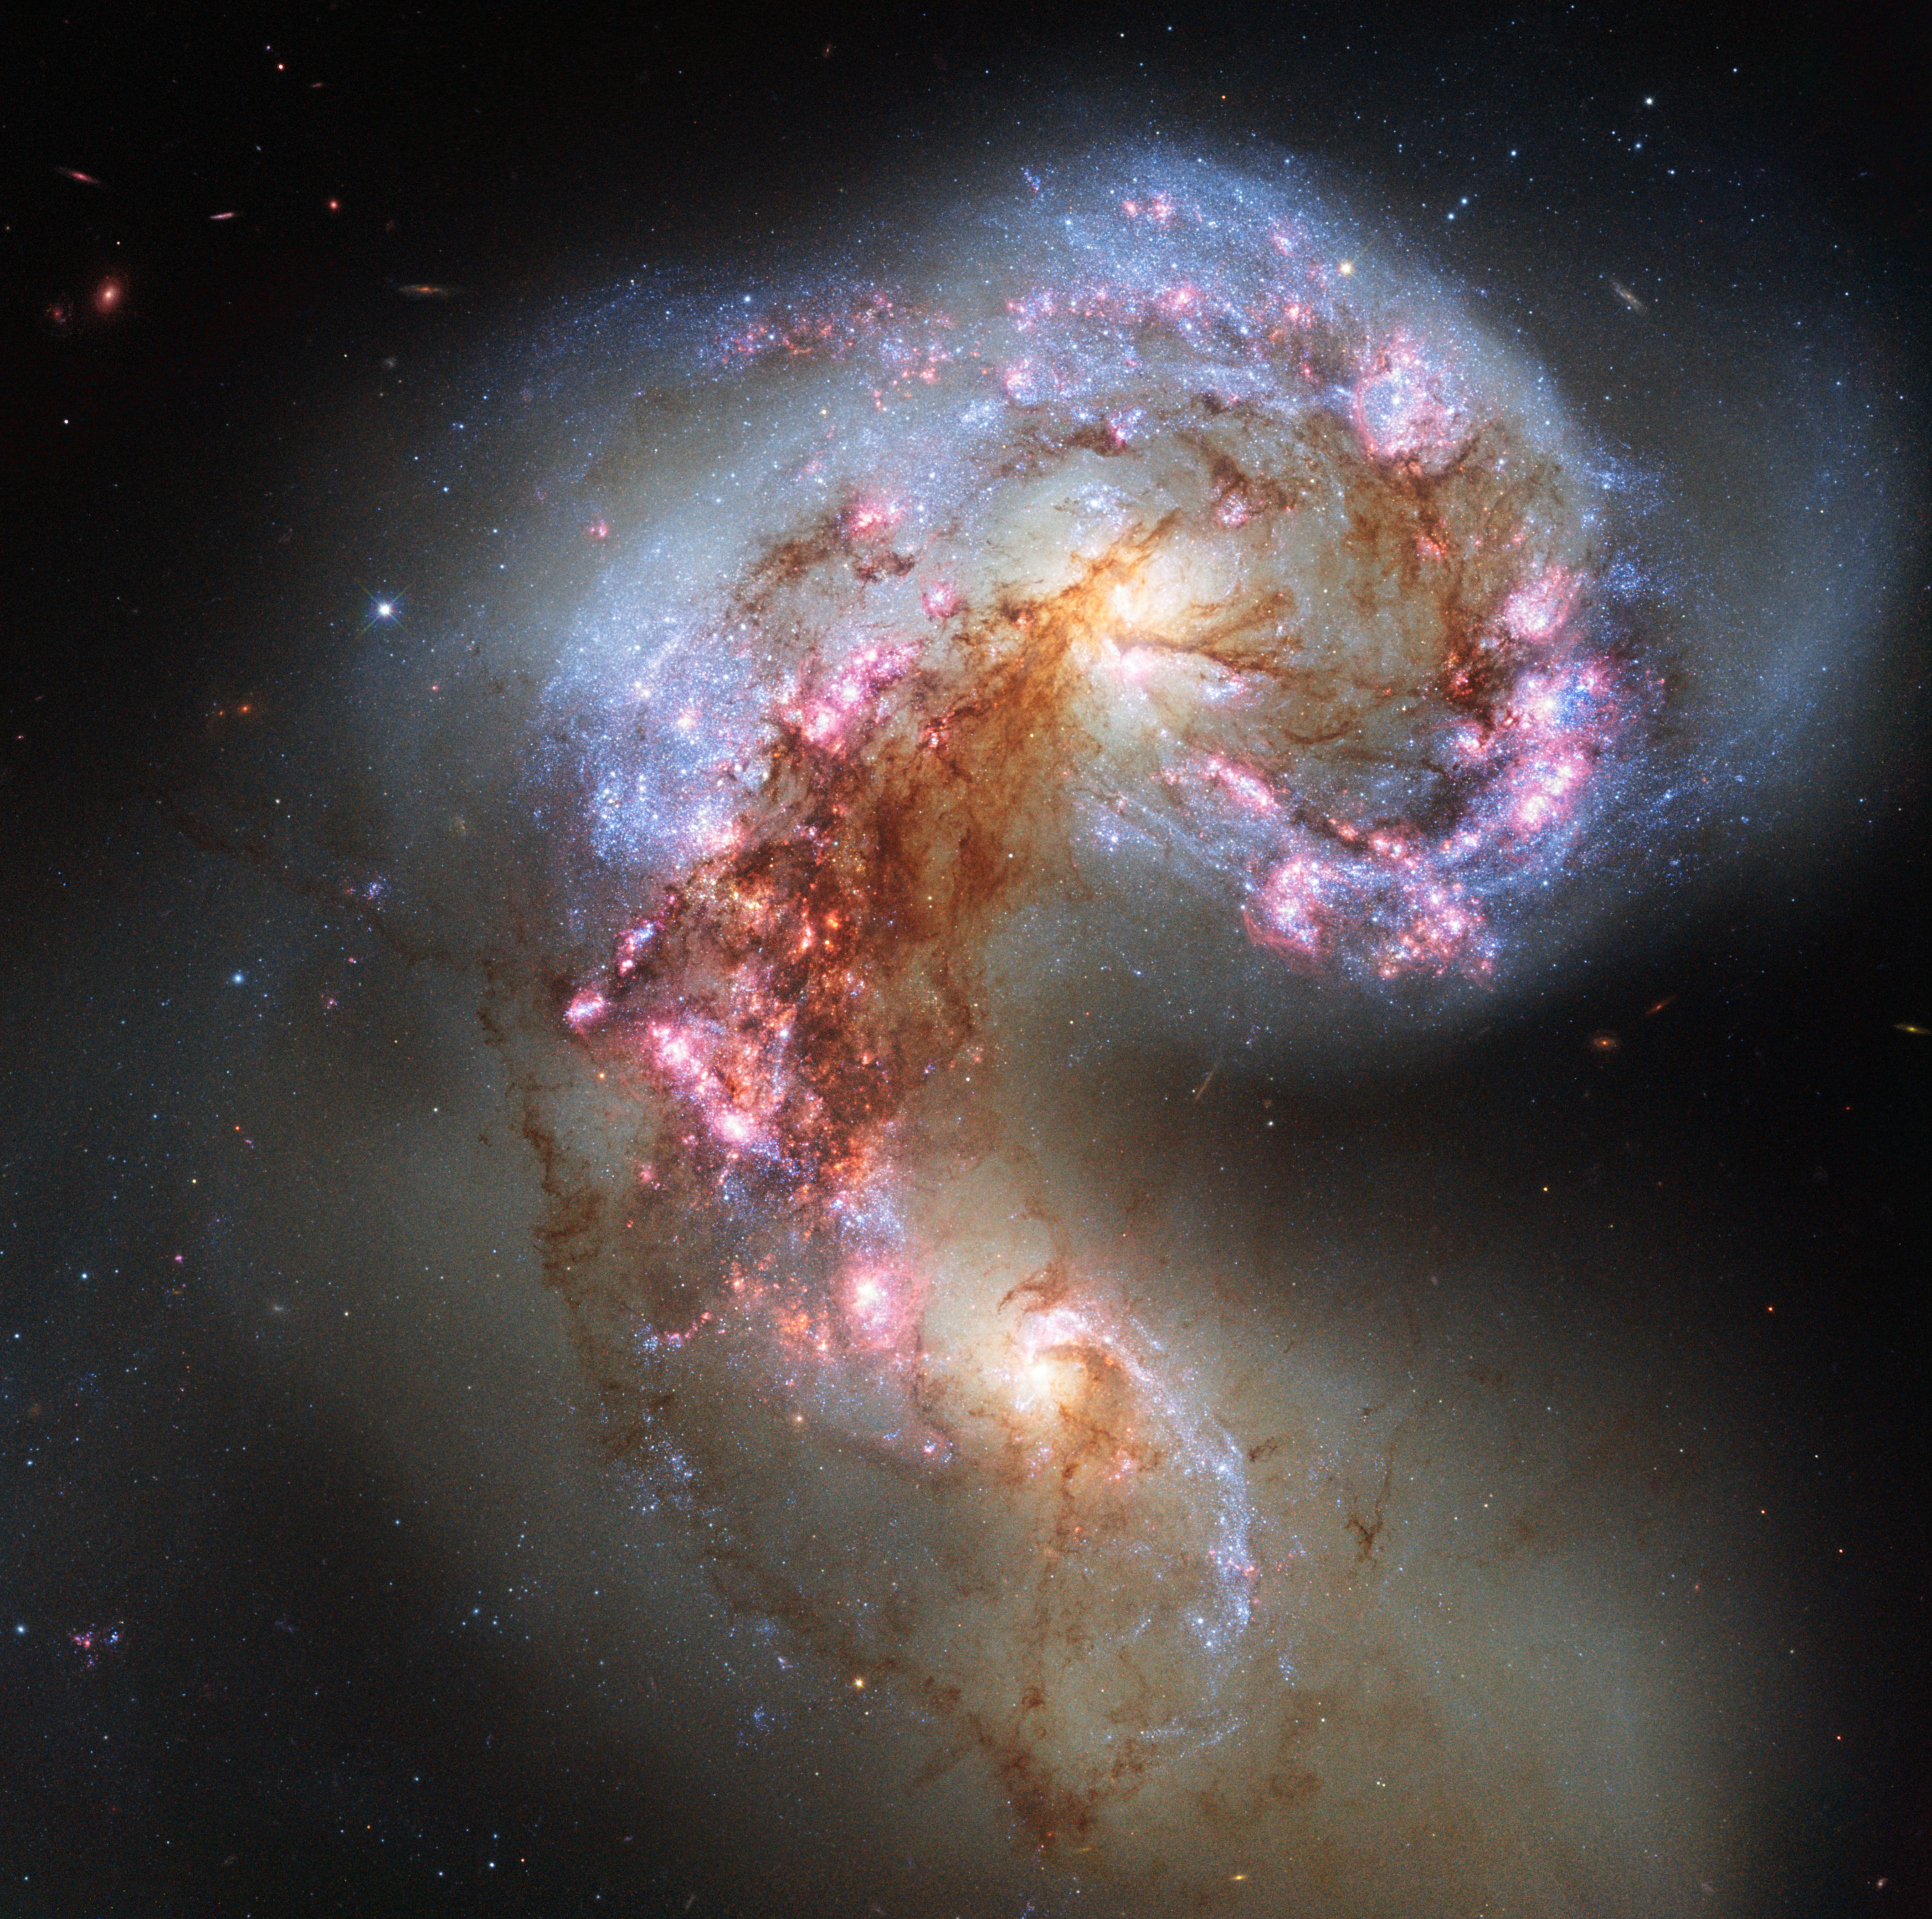

Antennae Galaxies reloaded

The NASA/ESA Hubble Space Telescope has snapped the best ever image of the Antennae Galaxies. Hubble has released images of these stunning galaxies twice before, once using observations from its Wide Field and Planetary Camera 2 (WFPC2) in 1997, and again in 2006 from the Advanced Camera for Surveys (ACS). Each of Hubble’s images of the Antennae Galaxies has been better than the last, due to upgrades made during the famous servicing missions, the last of which took place in 2009.

The galaxies — also known as NGC 4038 and NGC 4039 — are locked in a deadly embrace. Once normal, sedate spiral galaxies like the Milky Way, the pair have spent the past few hundred million years sparring with one another. This clash is so violent that stars have been ripped from their host galaxies to form a streaming arc between the two. In wide-field images of the pair the reason for their name becomes clear — far-flung stars and streamers of gas stretch out into space, creating long tidal tails reminiscent of antennae.

This new image of the Antennae Galaxies shows obvious signs of chaos. Clouds of gas are seen in bright pink and red, surrounding the bright flashes of blue star-forming regions — some of which are partially obscured by dark patches of dust. The rate of star formation is so high that the Antennae Galaxies are said to be in a state of starburst, a period in which all of the gas within the galaxies is being used to form stars. This cannot last forever and neither can the separate galaxies; eventually the nuclei will coalesce, and the galaxies will begin their retirement together as one large elliptical galaxy.

This image uses visible and near-infrared observations from Hubble’s Wide Field Camera 3 (WFC3), along with some of the previously-released observations from Hubble’s Advanced Camera for Surveys (ACS).

Credit: ESA/Hubble & NASA